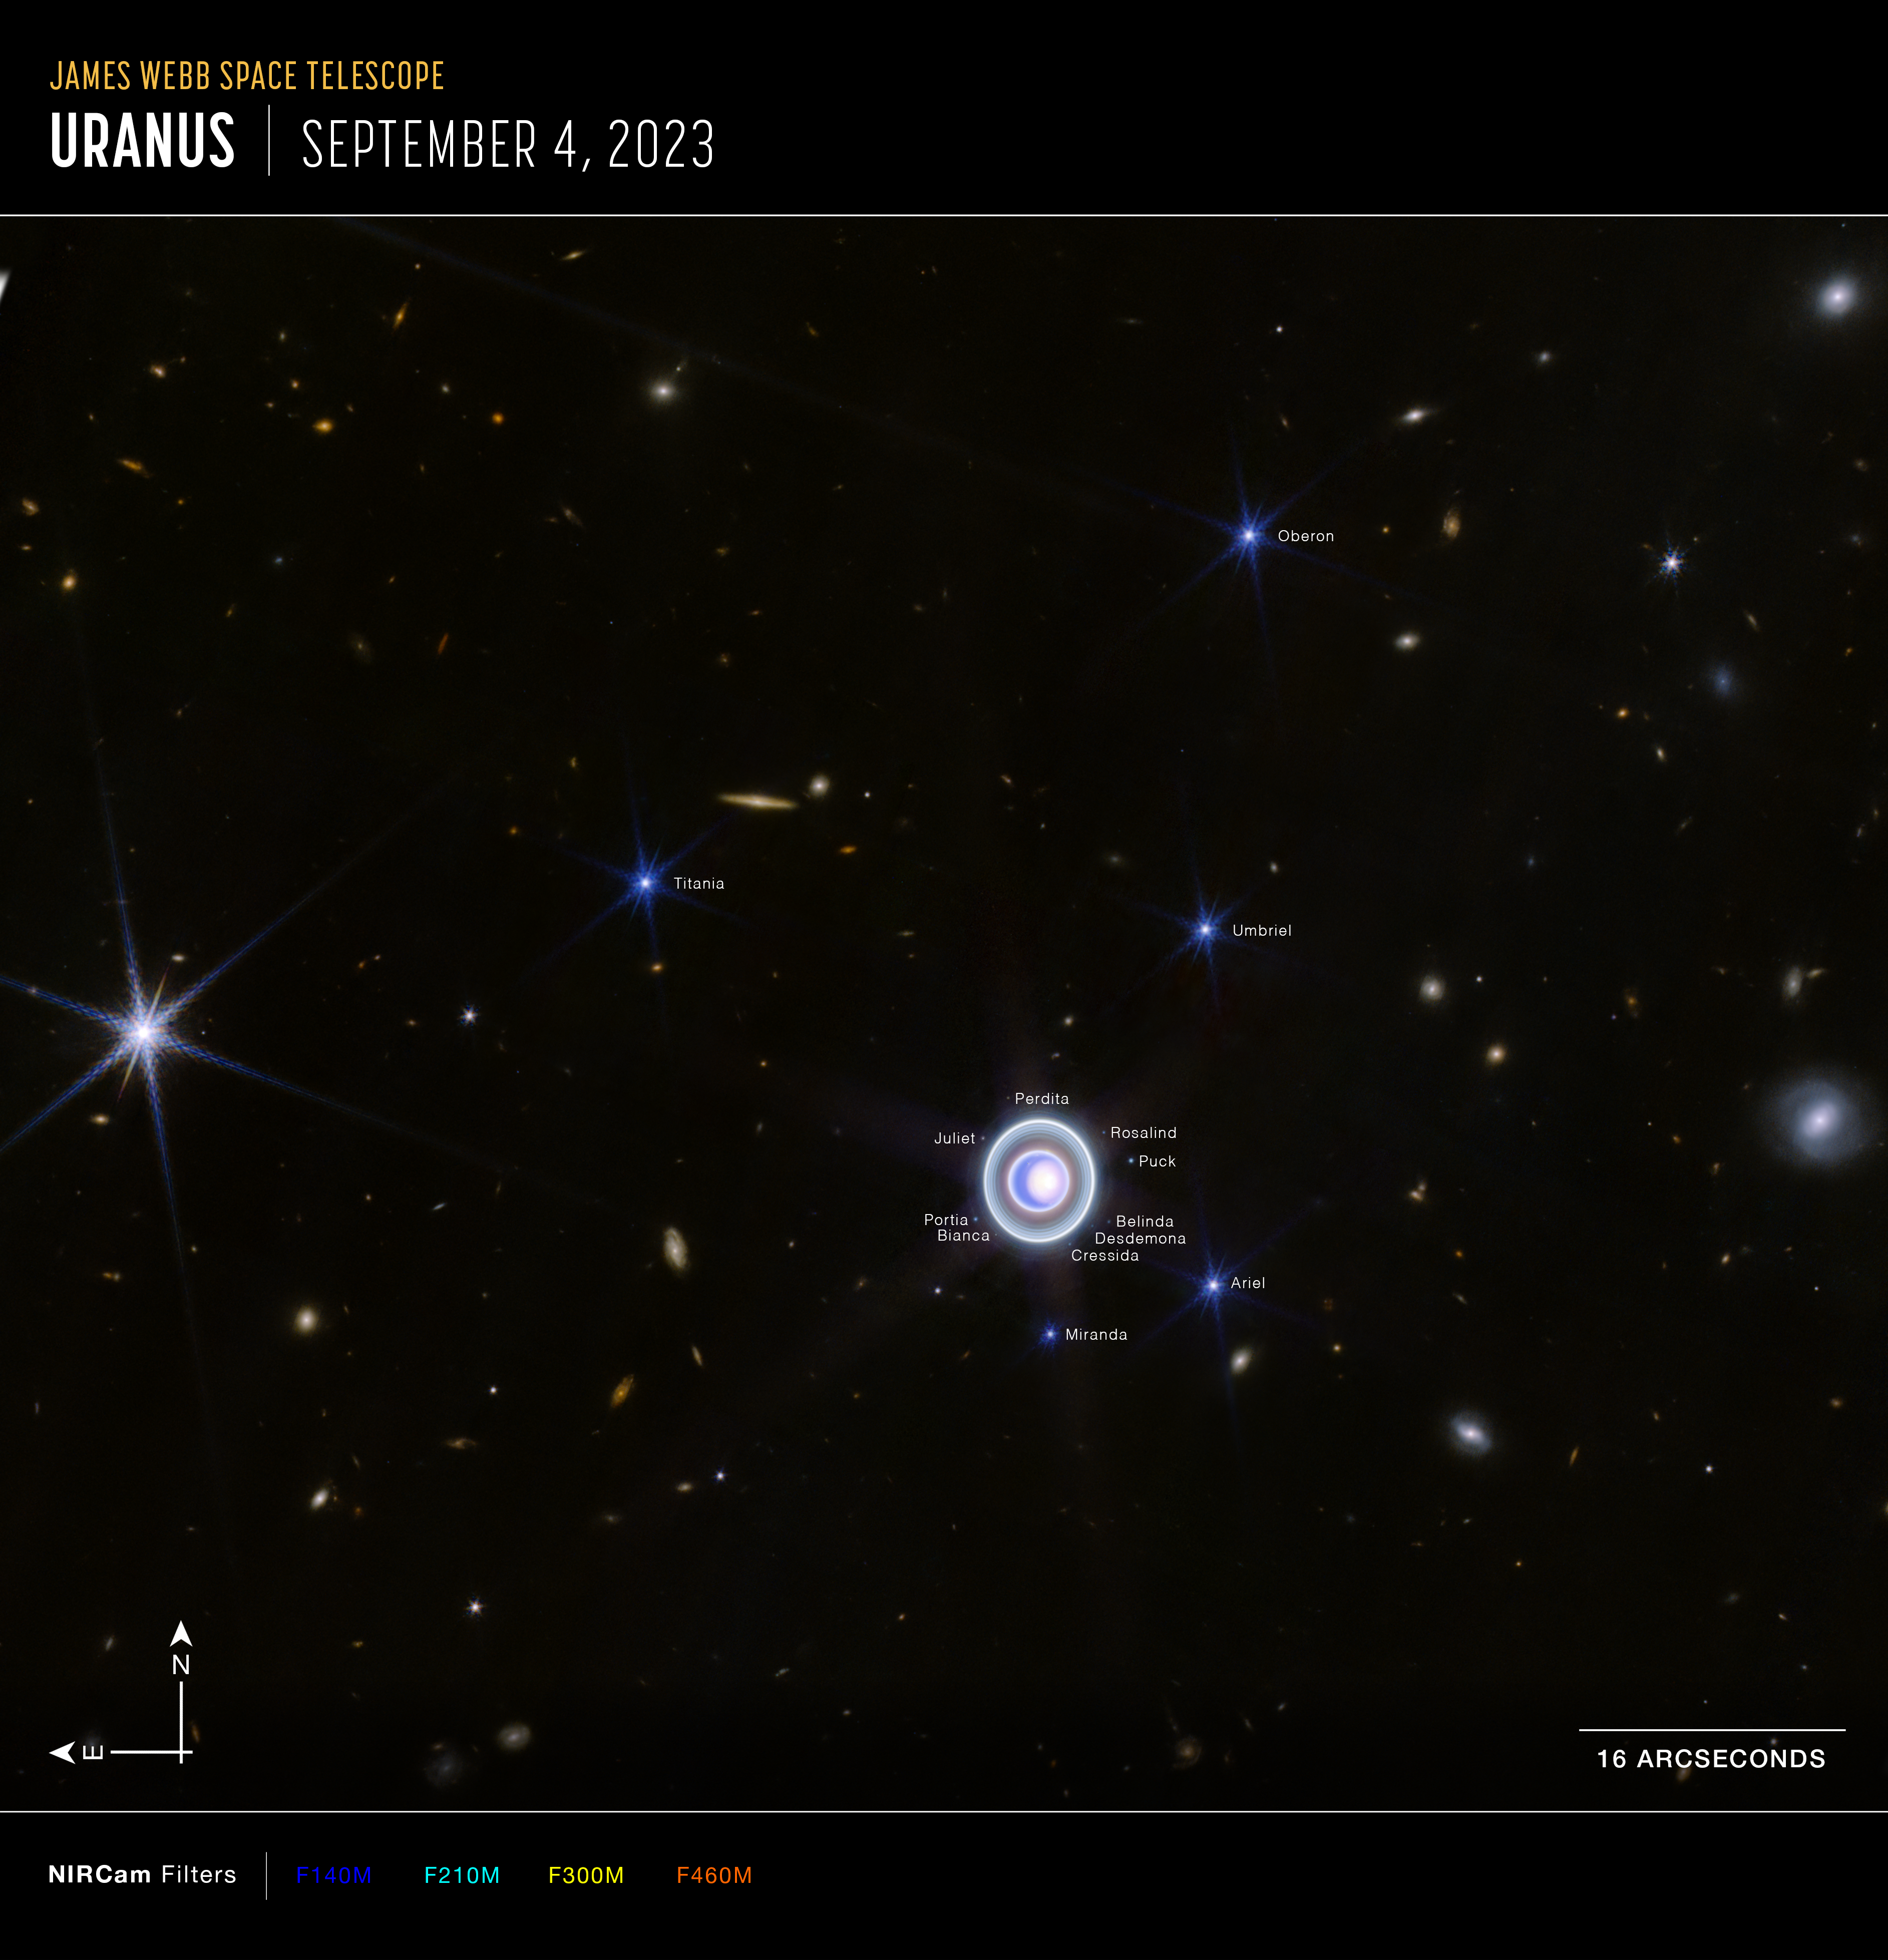

Uranus widefield view (NIRCam compass image)

This image of Uranus, captured by Webb’s Near-Infrared Camera (NIRCam), shows compass arrows, scale bar, and colour key for reference.

The north and east compass arrows show the orientation of the image on the sky. Note that the relationship between north and east on the sky (as seen from below) is flipped relative to direction arrows on a map of the ground (as seen from above).

The scale bar is labelled 16 arcseconds. The length of the scale bar is approximately one-seventh the total width of the image

This image shows invisible near-infrared wavelengths of light that have been translated into visible-light colours. The colour key shows which NIRCam filters were used when collecting the light. The colour of each filter name is the visible light colour used to represent the infrared light that passes through that filter.

Webb’s NIRCam filters for this image are F140M (blue), F210M (cyan), F300M (yellow), and F460M (orange).

Credit: NASA, ESA, CSA, STScI